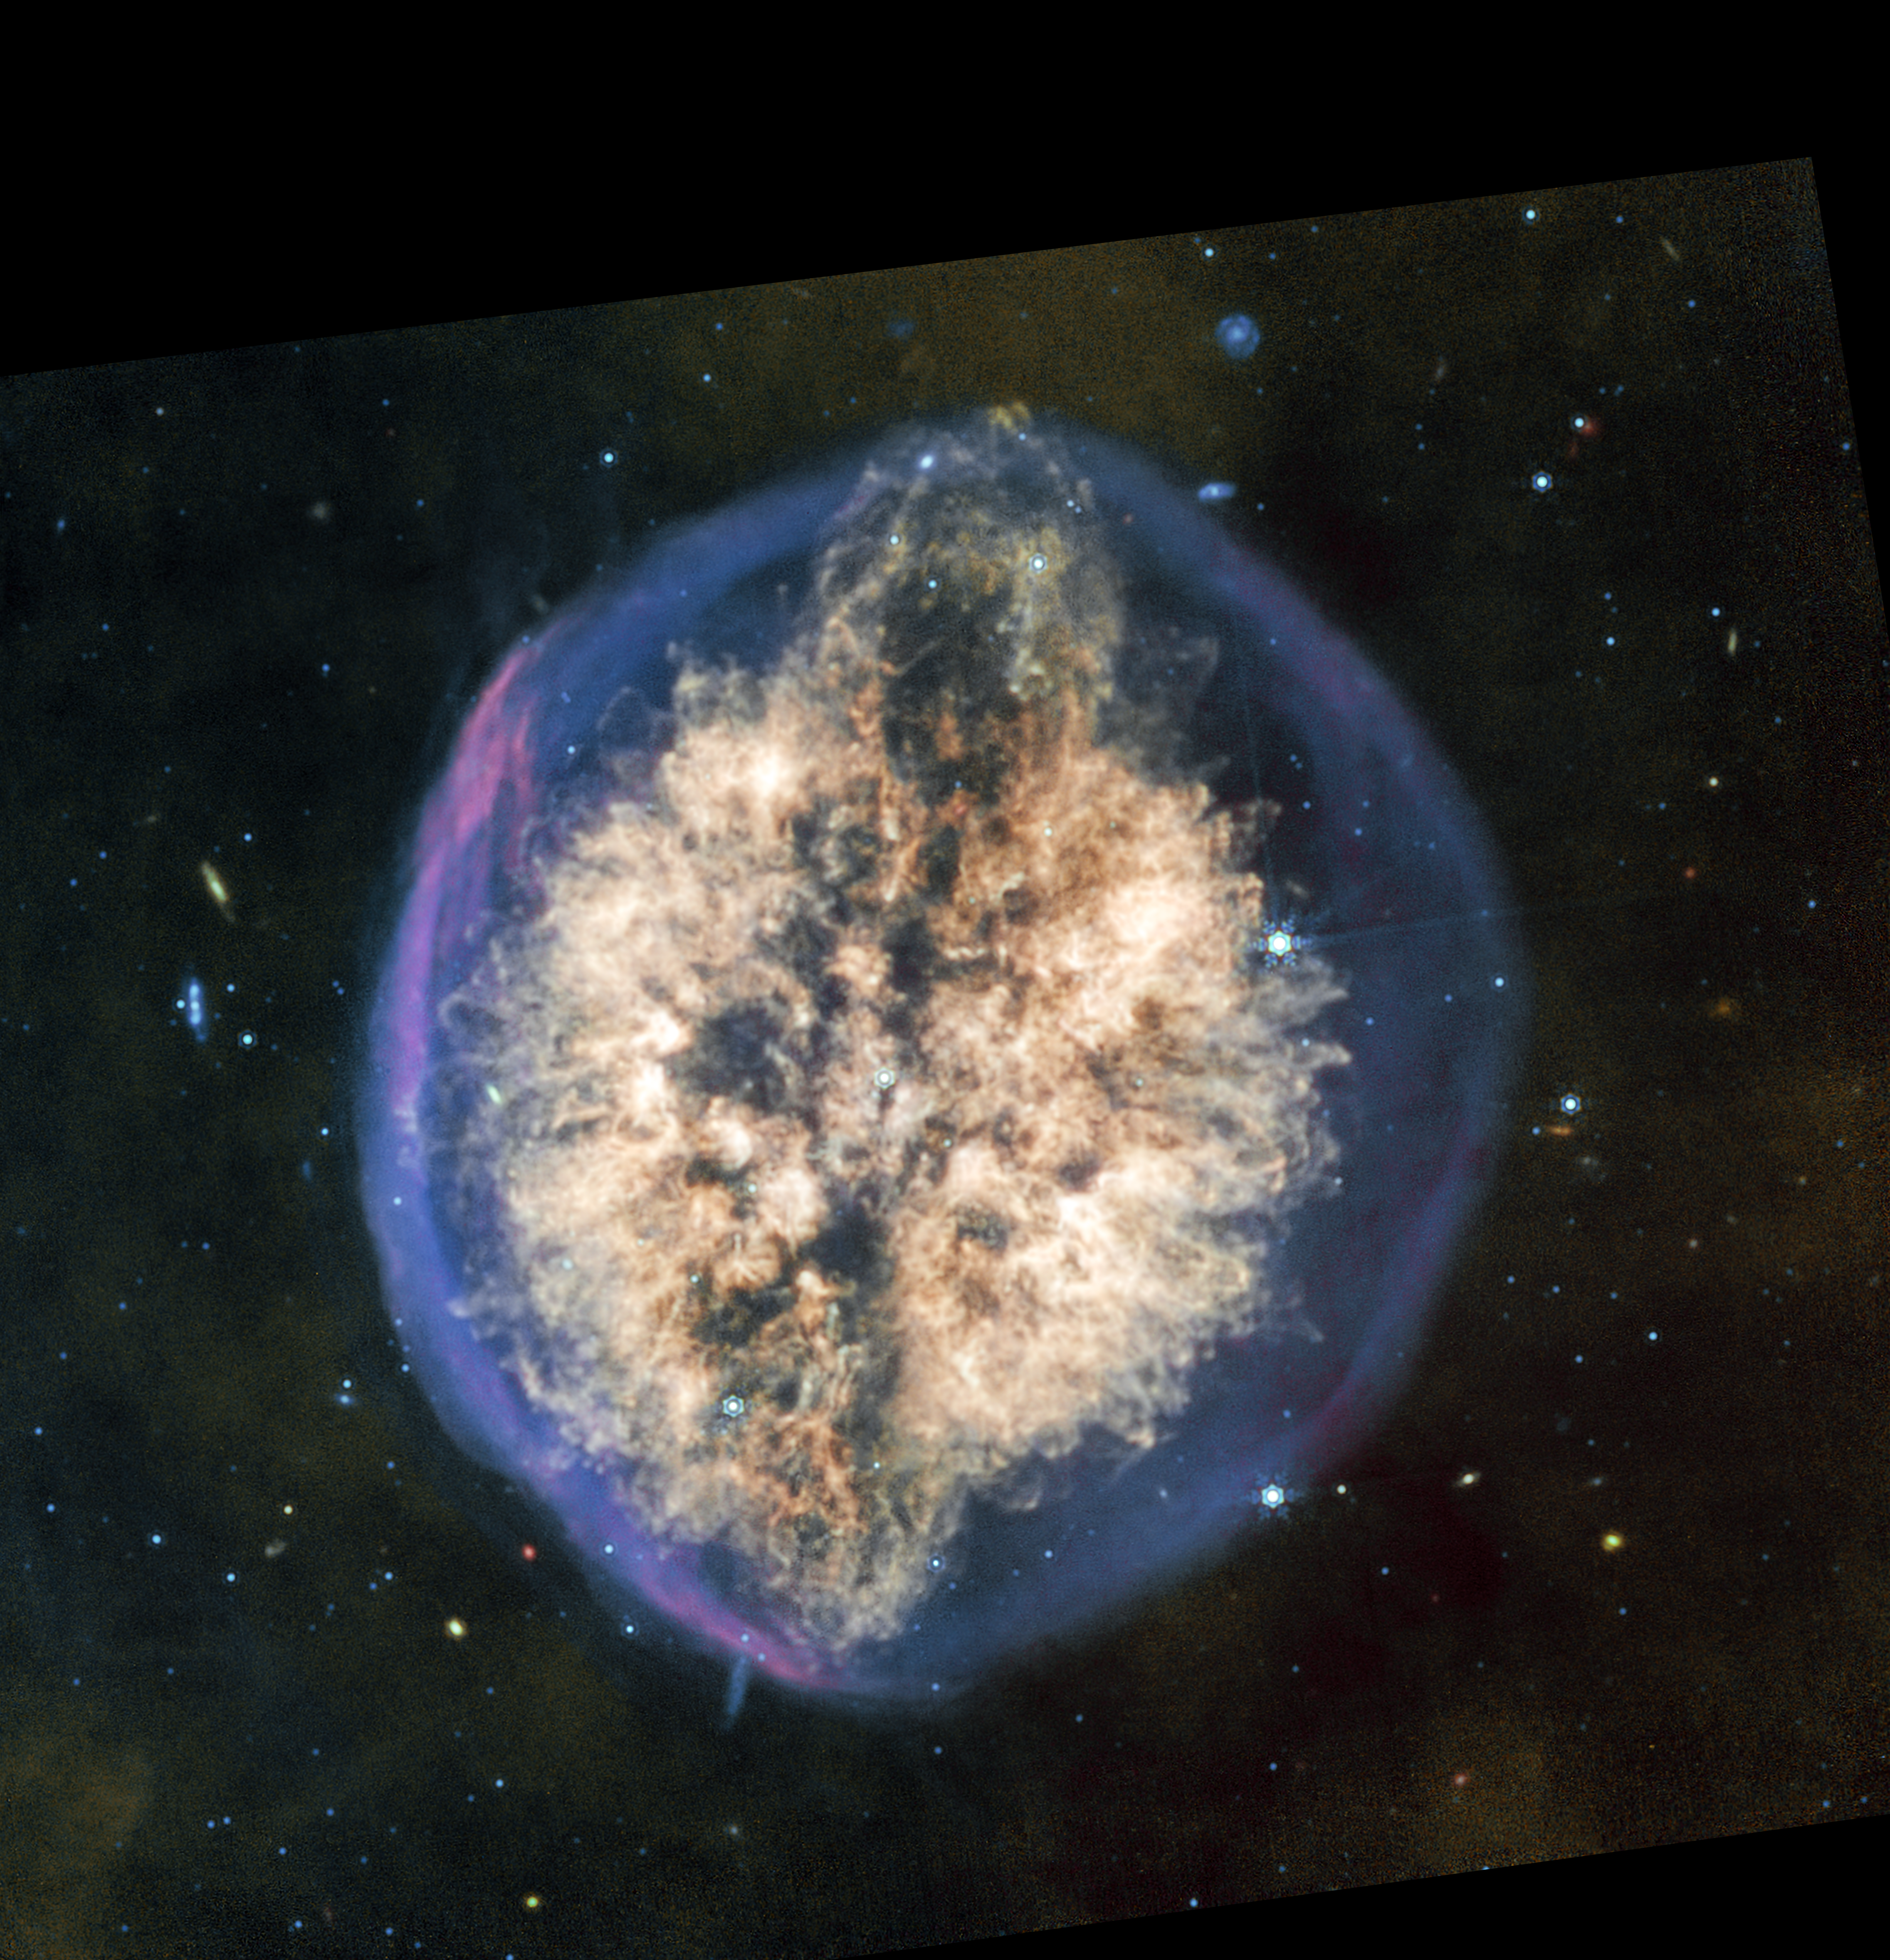

Exposed Cranium Nebula (MIRI image)

More of the dusty material in the nebula PMR 1 shows up in the mid-infrared light captured by the James Webb Space Telescope’s MIRI (Mid-Infrared Instrument). Fewer stars and background galaxies appear in this image than in the near-infrared light captured by Webb’s NIRCam (Near-Infrared Camera) instrument. Seeing the nebula in different wavelengths of infrared light will give astronomers a better idea of how much material the dying star at the heart of the nebula is shedding, and what phase of its decline Webb has captured.

Like NIRCam, MIRI also shows two distinctly different-looking phases of the nebula’s formation — an outer shell primarily of hydrogen that was blown off first, then a more complex and structured mix of material closer to the centre of the nebula. Together, these episodes give the nebula the unusual appearance of a brain inside a semi-transparent skull.

The MIRI instrument shows the ejection of material at the top of the nebula more prominently than NIRCam, interrupting the overall oval, brain-like shape. Less prominent is a potential twin ejection on the opposite, bottom side, hinting at a potential bipolar outflow that, with further analysis, can shed light on the dynamics at play inside this “exposed cranium.”

Credit: NASA, ESA, CSA, STScI, Image Processing: Joseph DePasquale (STScI)